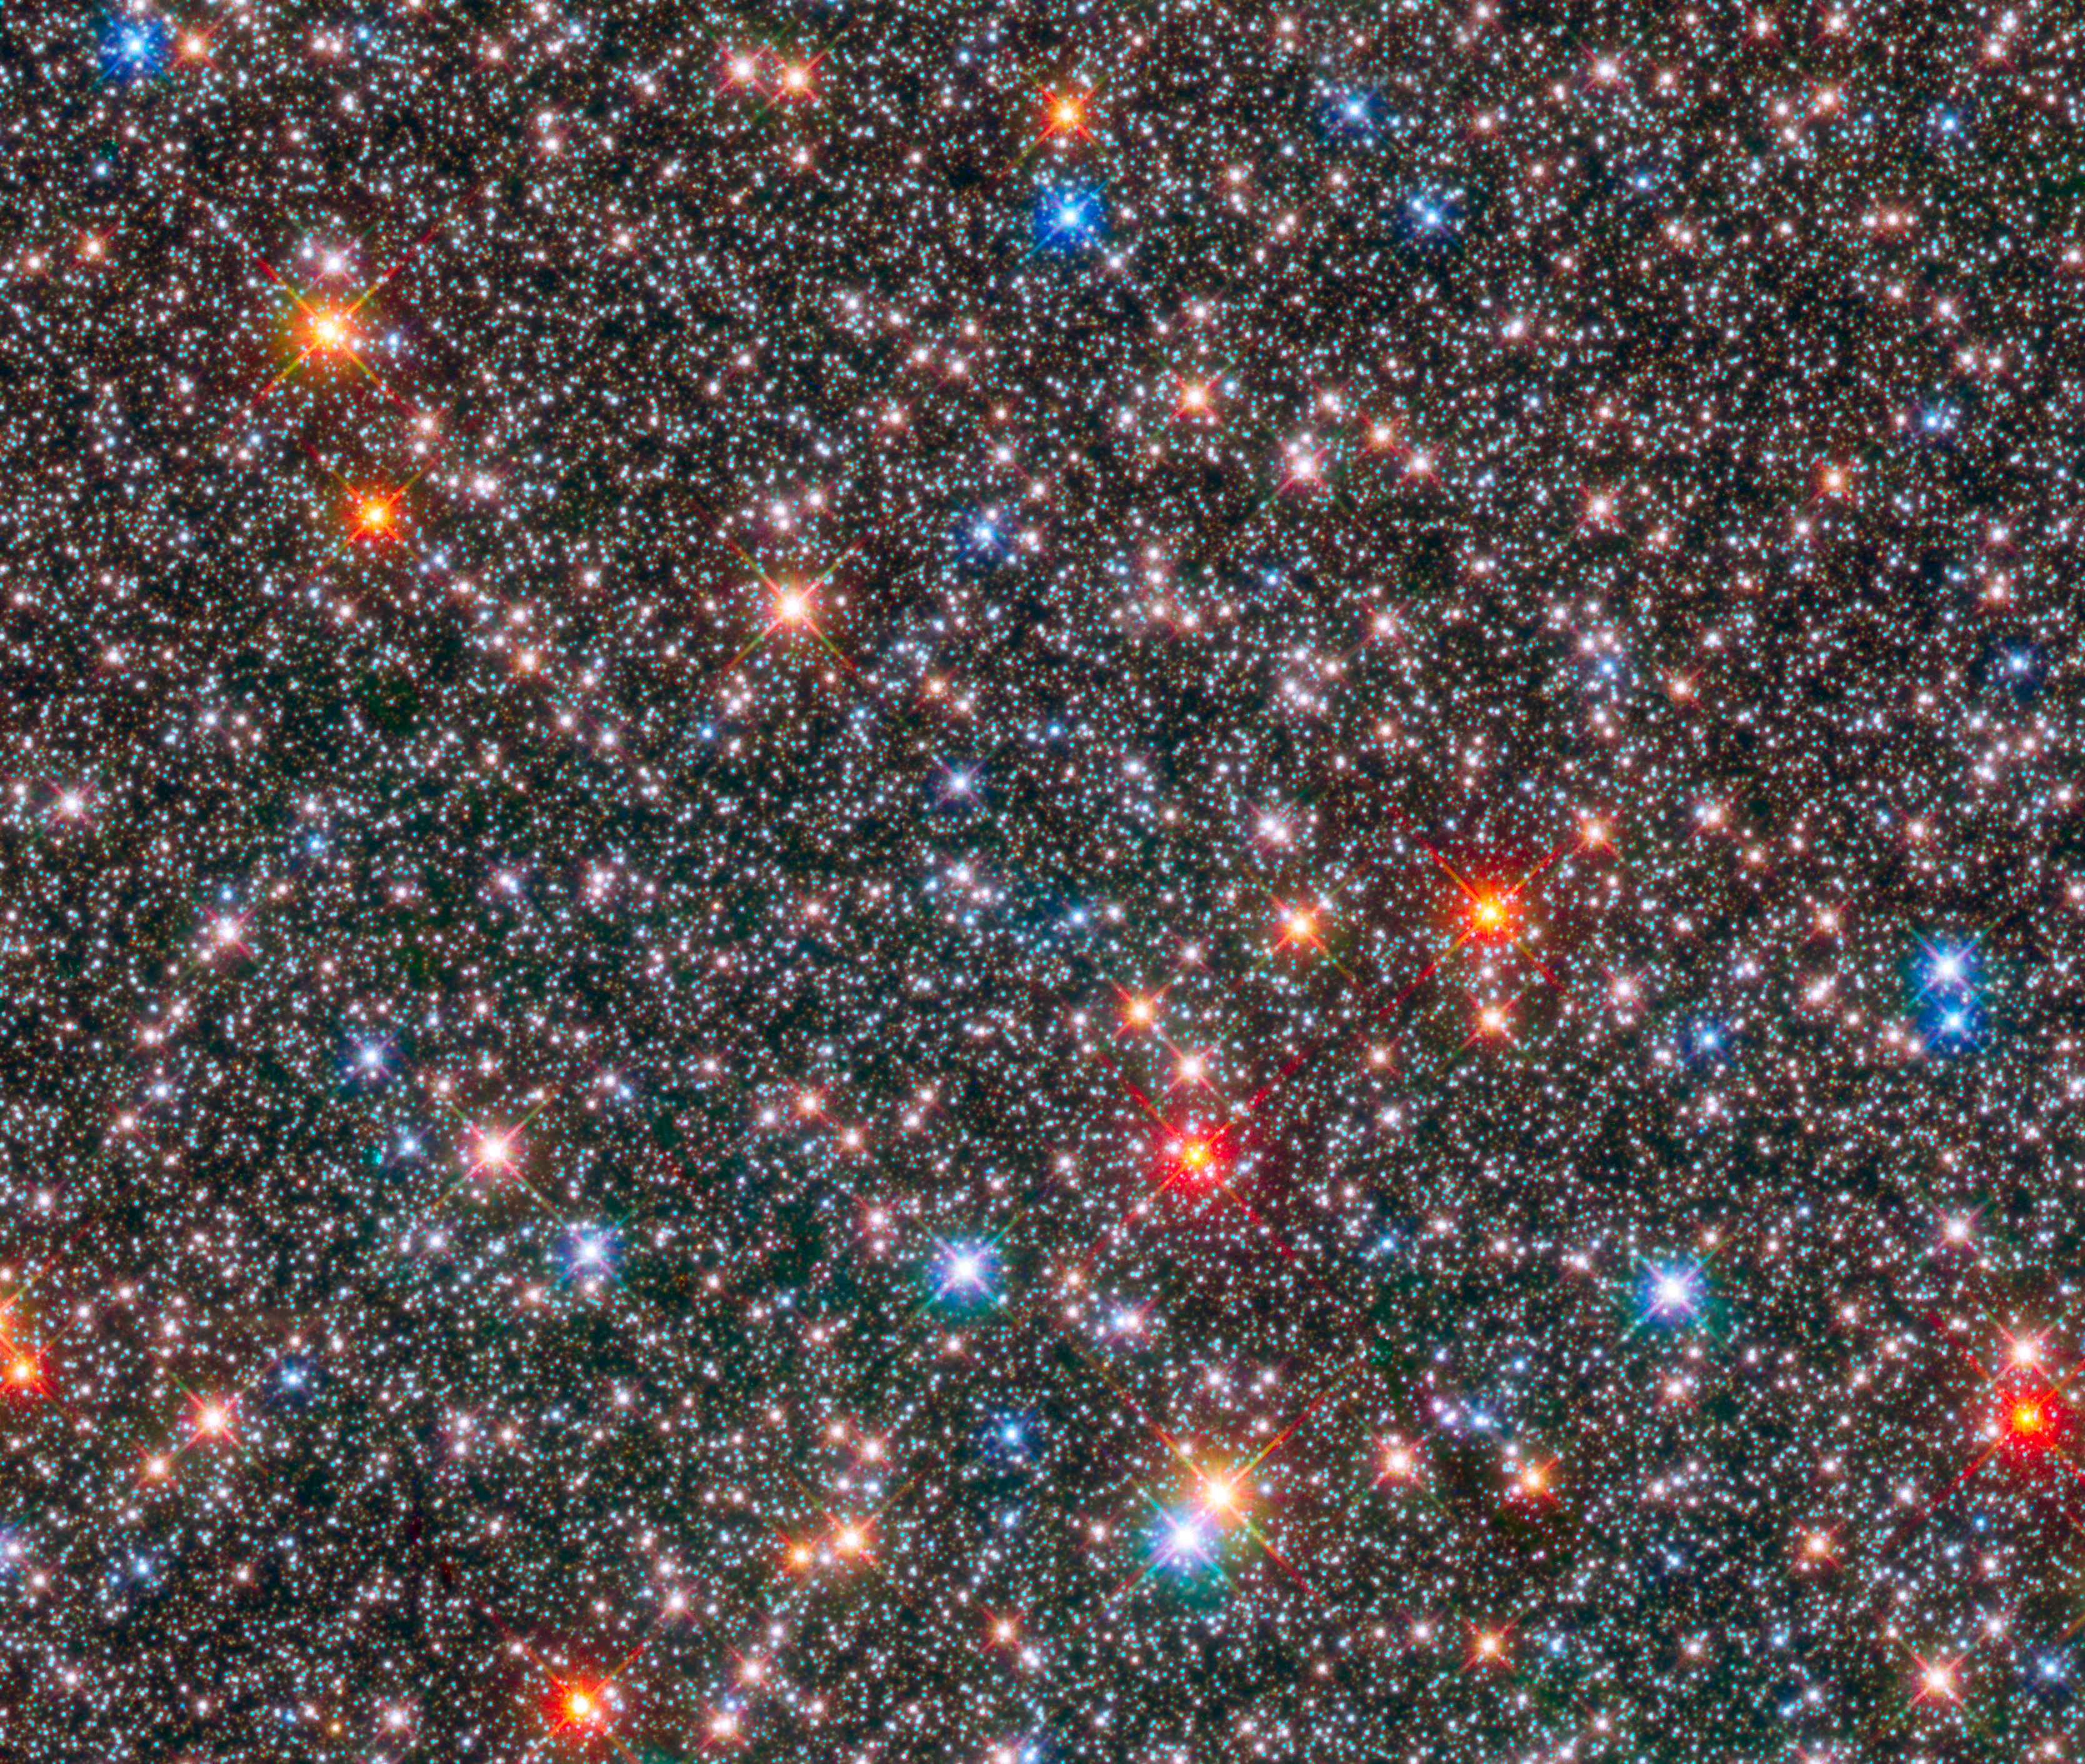

Hubble captures glittering crowded hub of our Milky Way

This image from the NASA/ESA Hubble Space Telescope shows a sparkling jewel box full of stars captured the heart of our Milky Way.

Aging red giant stars coexist with their more plentiful younger cousins, the smaller, white, Sun-like stars, in this crowded region of our galaxy’s ancient central hub, or bulge. Most of the bright blue stars in the image are probably recently formed stars located in the foreground, in the galaxy's disc. Astronomers studied 10 000 of these Sun-like stars in archival Hubble images over a nine-year period to unearth clues to our galaxy’s evolution.

The study reveals that the Milky Way’s bulge is a dynamic environment of variously aged stars zipping around at different speeds, like travelers bustling about a busy airport.

The researchers found that the motions of bulge stars are different, depending on a star’s chemical composition. Stars richer in elements heavier than hydrogen and helium have less disordered motions, but are orbiting around the galactic centre faster than older stars that are deficient in heavier elements.

The image is a composite of exposures taken in near-infrared and visible light with Hubble’s Wide Field Camera 3. The observations are part of two Hubble surveys: the Galactic Bulge Treasury Program and the Sagittarius Window Eclipsing Extrasolar Planet Search.

The centre of our galaxy is about 26 000 light-years away.

Credit: NASA, ESA, and T. Brown (STScI), W. Clarkson (University of Michigan-Dearborn), and A. Calamida and K. Sahu (STScI)